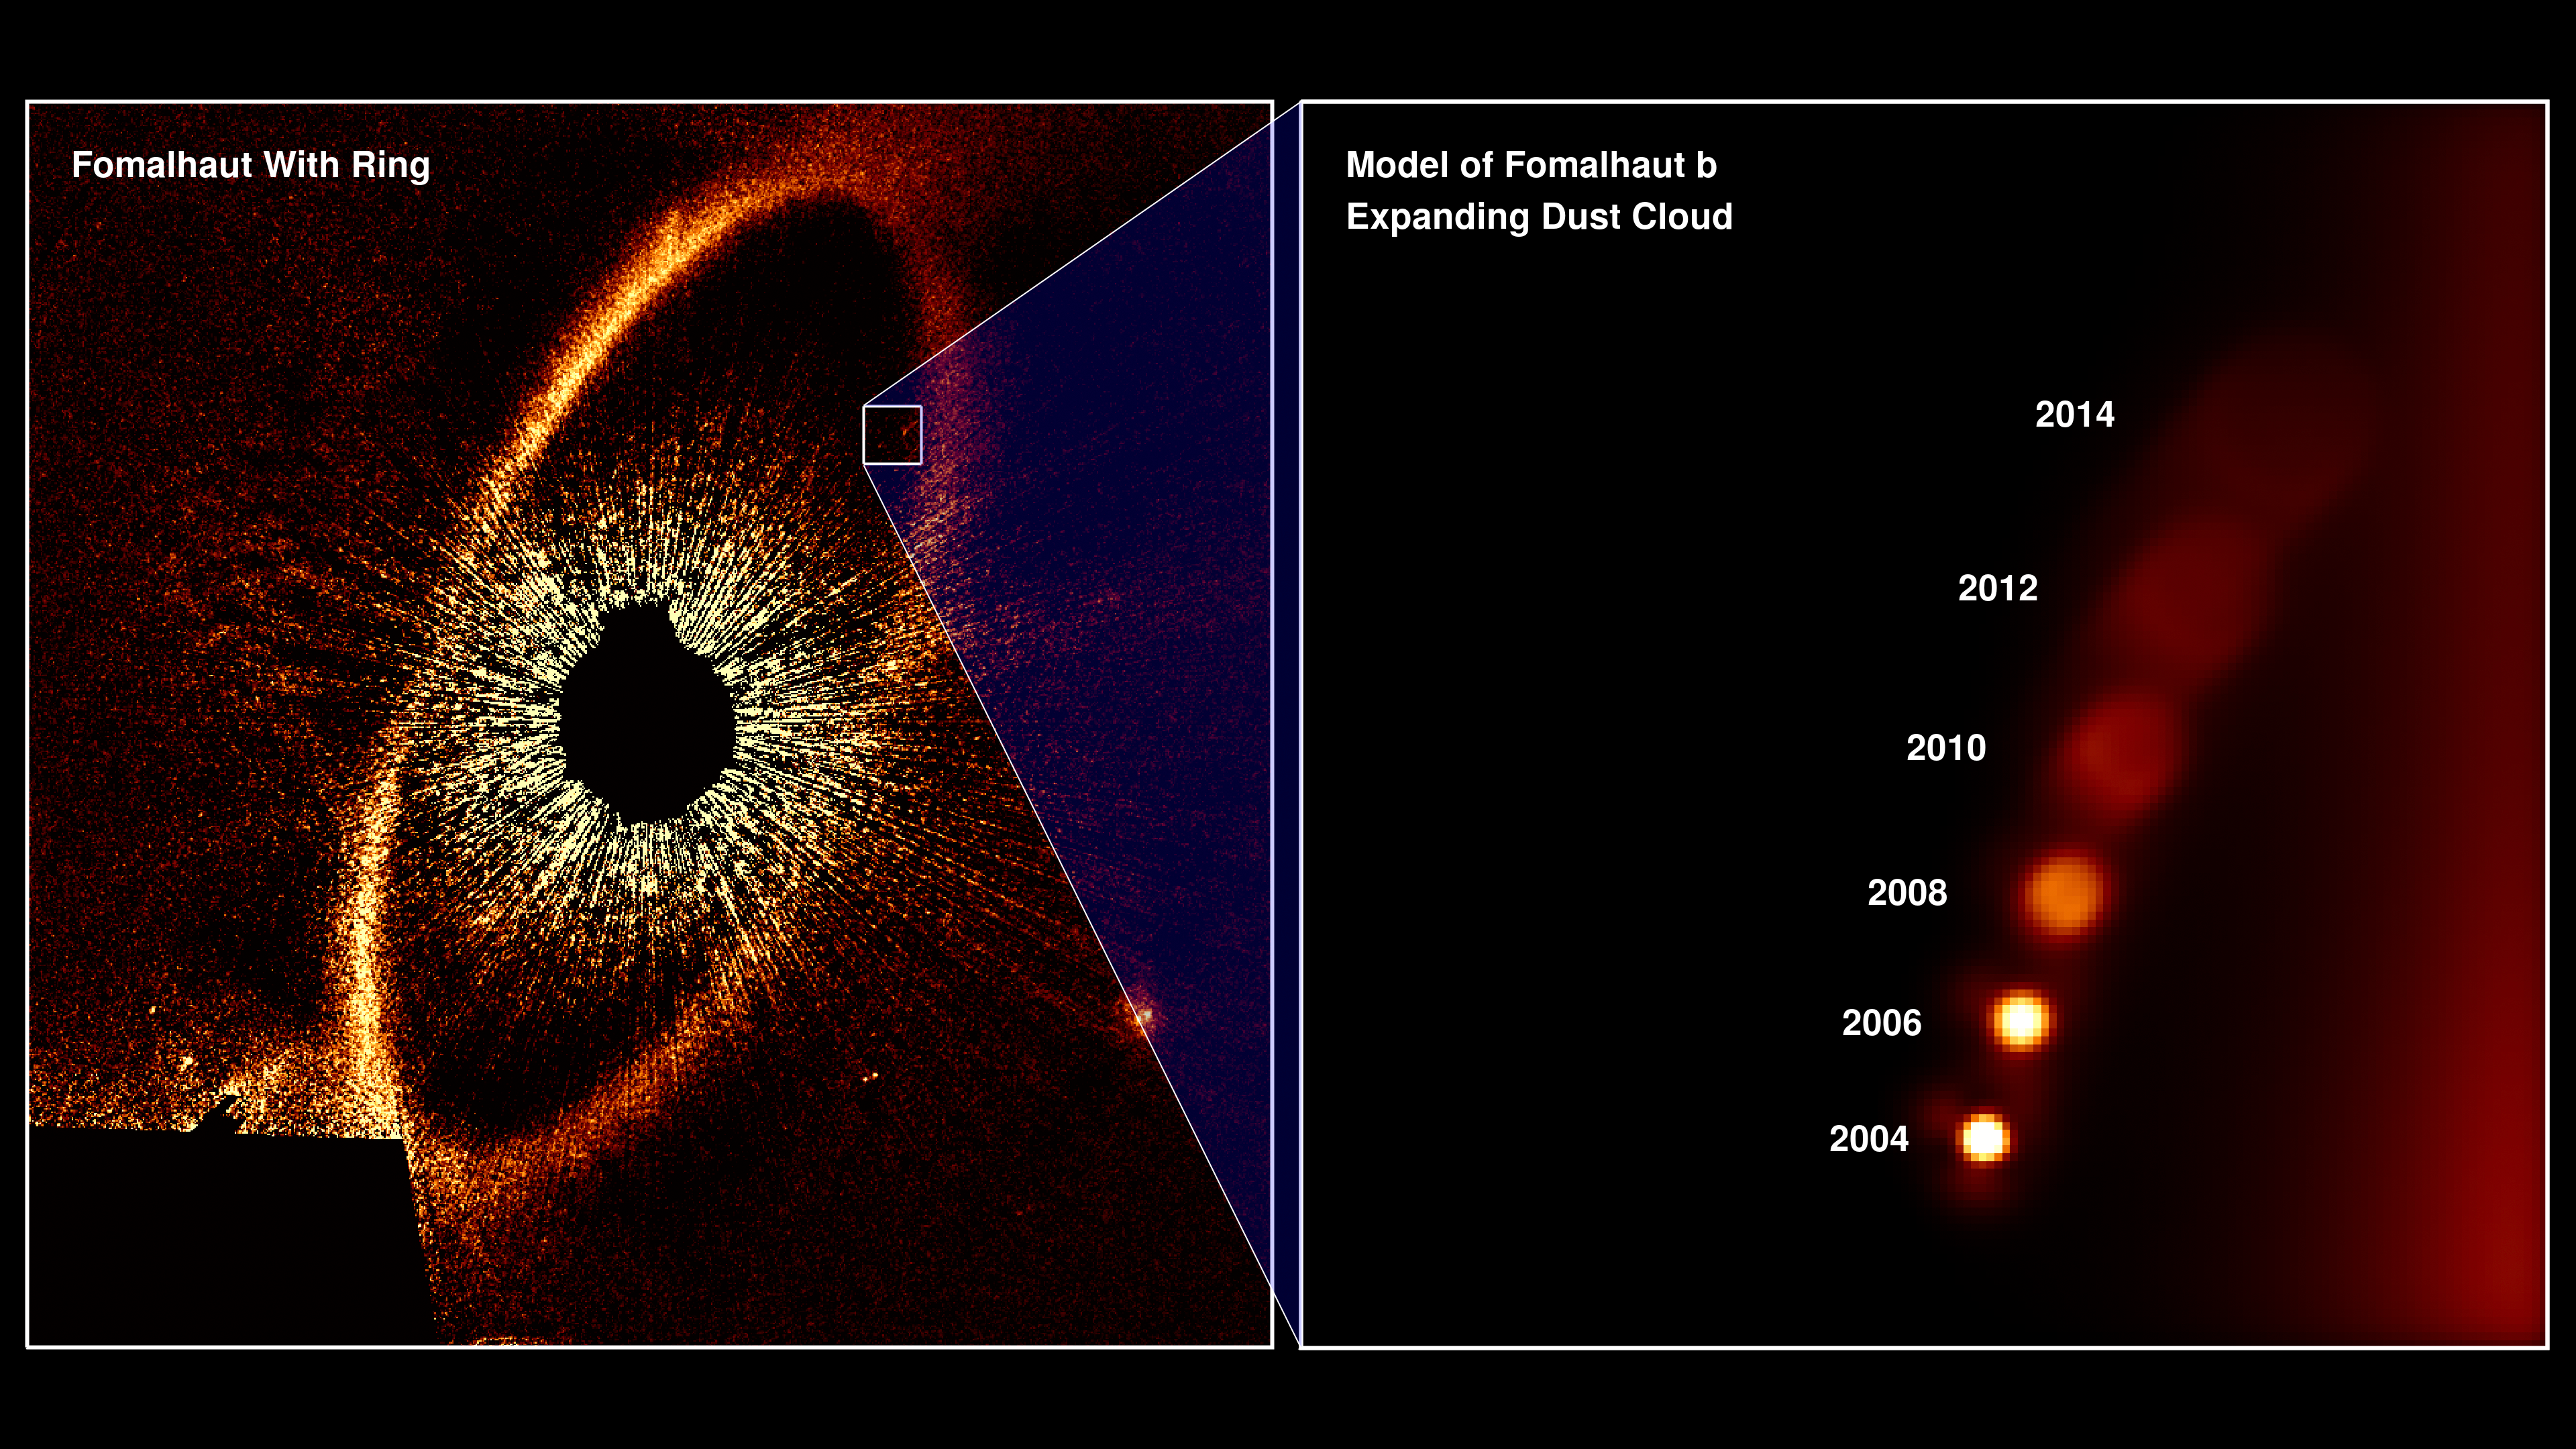

Illustration of Hubble’s Observation of Fomalhaut b’s Expanding Dust Cloud

Illustration from the Hubble Space Telescope’s observations of Fomalhaut b’s expanding dust cloud from 2004 to 2013. The cloud was produced in a collision between two large bodies orbiting the bright nearby star Fomalhaut. This is the first time such a catastrophic event around another star has been imaged.

Credit: NASA, ESA, and A. Gáspár and G. Rieke (University of Arizona)